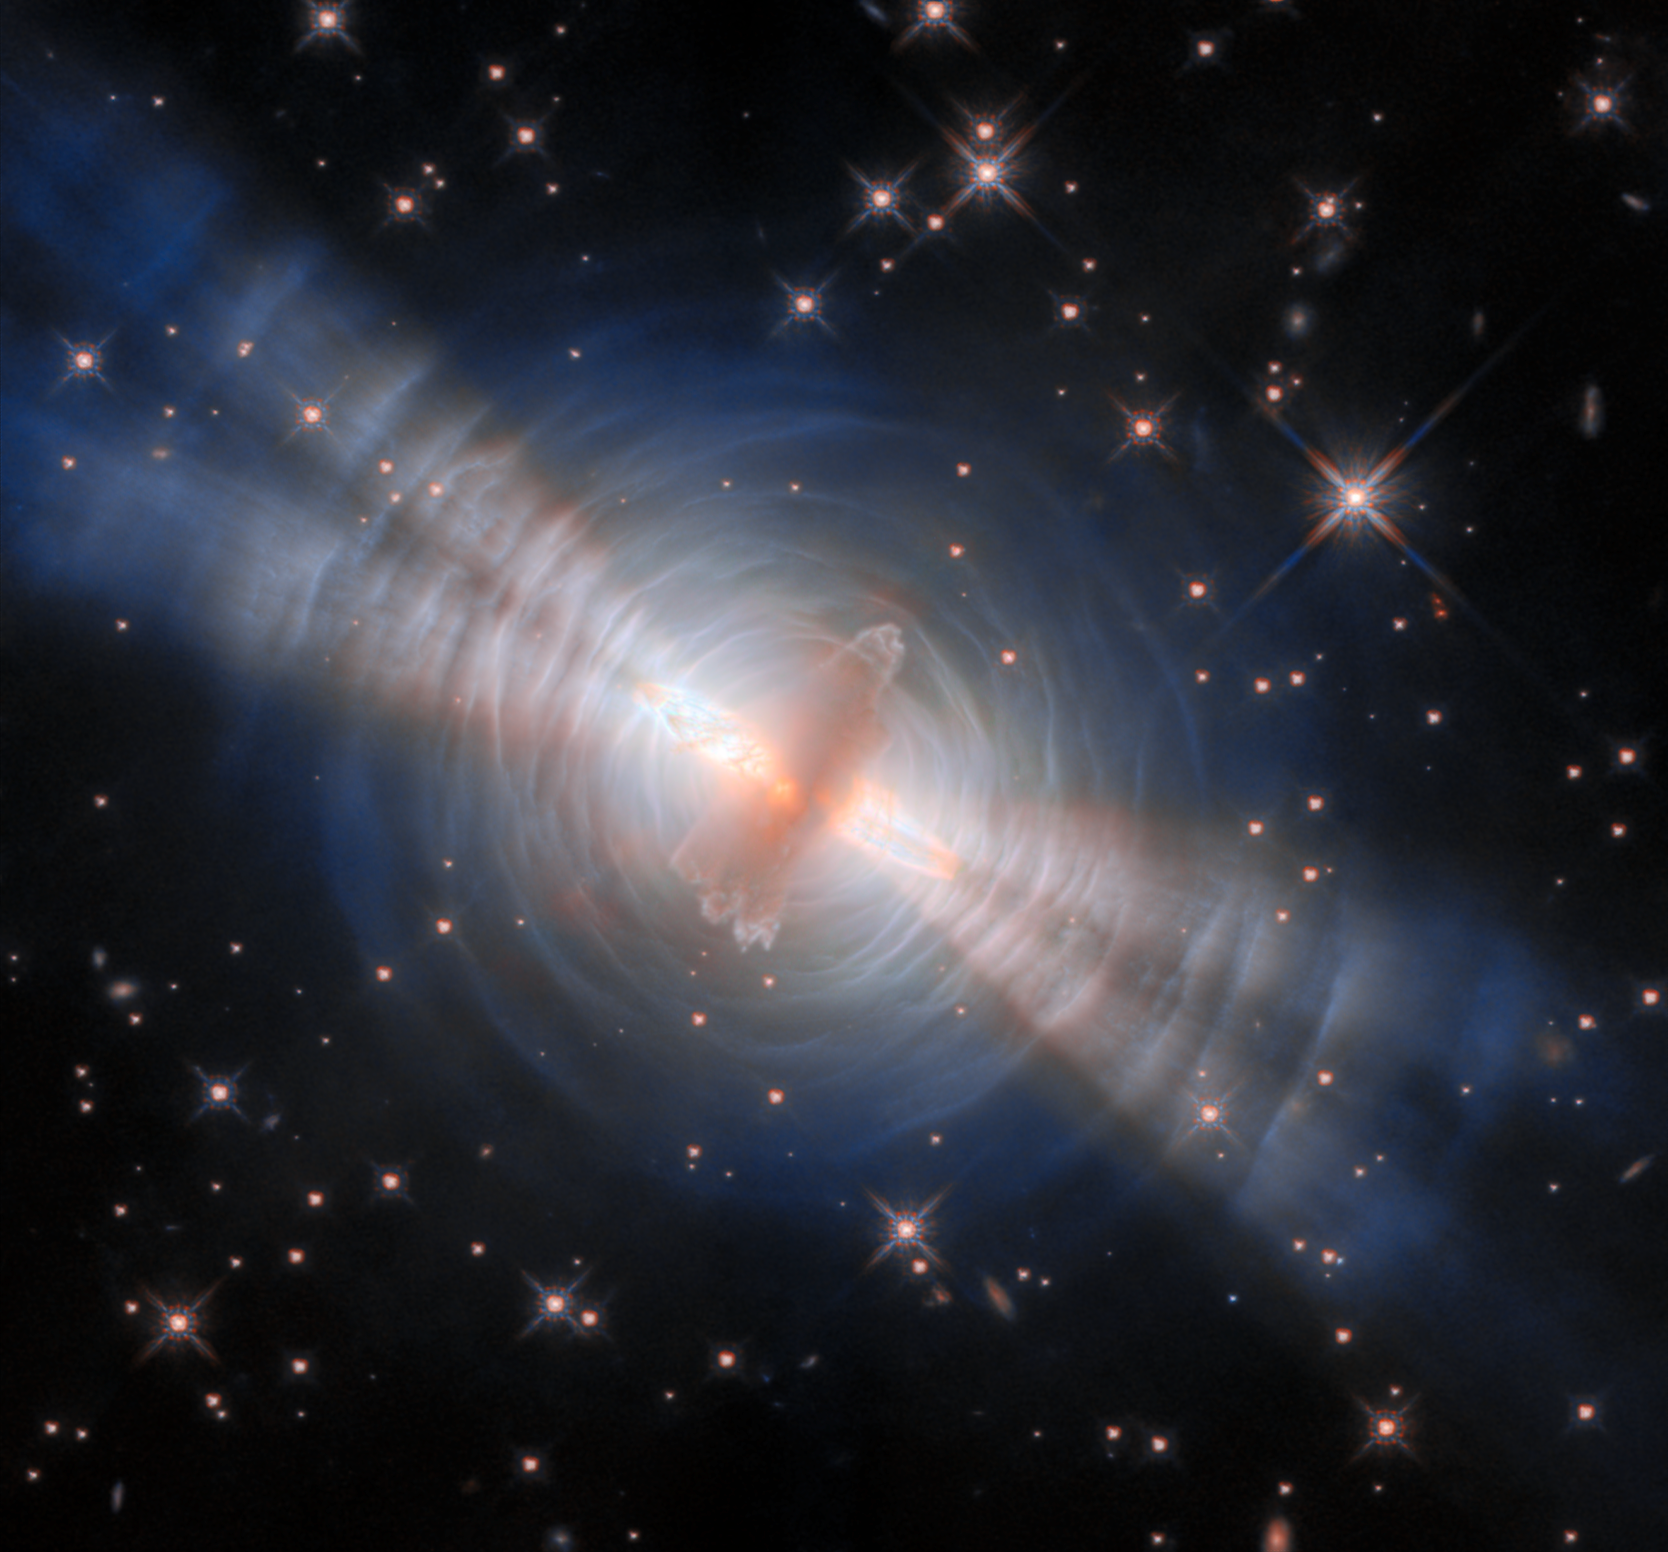

The Egg Nebula

This newly processed image from the NASA/ESA Hubble Space Telescope is the clearest view yet of the Egg Nebula. It is a preplanetary nebula, a structure of gas and dust created as a Sun-like star approaches the end of its life. The Egg that we see now will eventually hatch, revealing a white dwarf at its centre and leaving its shell to become a spectacular planetary nebula.

Many preplanetary nebulae are relatively dim and hard to spot. They are made of layers of gas ejected by the star, but that star is not yet hot enough to ionise the gas and cause it to glow. The Egg Nebula is relatively unique, easily visible as a sparkling jewelled egg in space. Powerful beams of starlight blast out of the inner cloud, two a-side, giving a breathtaking illumination to this cosmic structure. Fast-moving outflows of hot molecular hydrogen also emerge from within the dust cloud, visible just at the base of the searchlight beams. These outflows glow with infrared light, which is shown in this image by orange highlights.

The central cloud of dust is surrounded by concentric rings, themselves made up from thin, faint arcs of gas. These were created by successive outbursts from the central star, which ejected a little more material from its outer surface every few hundred years. The beams of starlight are reflected by these layers of gas, creating an appearance like ripples on the surface of water. The way that gas molecules reflect and scatter light gives a bluish colour to the arcs. The reflected starlight reveals important details about the central star, which is impossible to view directly in its dusty shell.

Credit: ESA/Hubble & NASA, B. Balick (University of Washington)